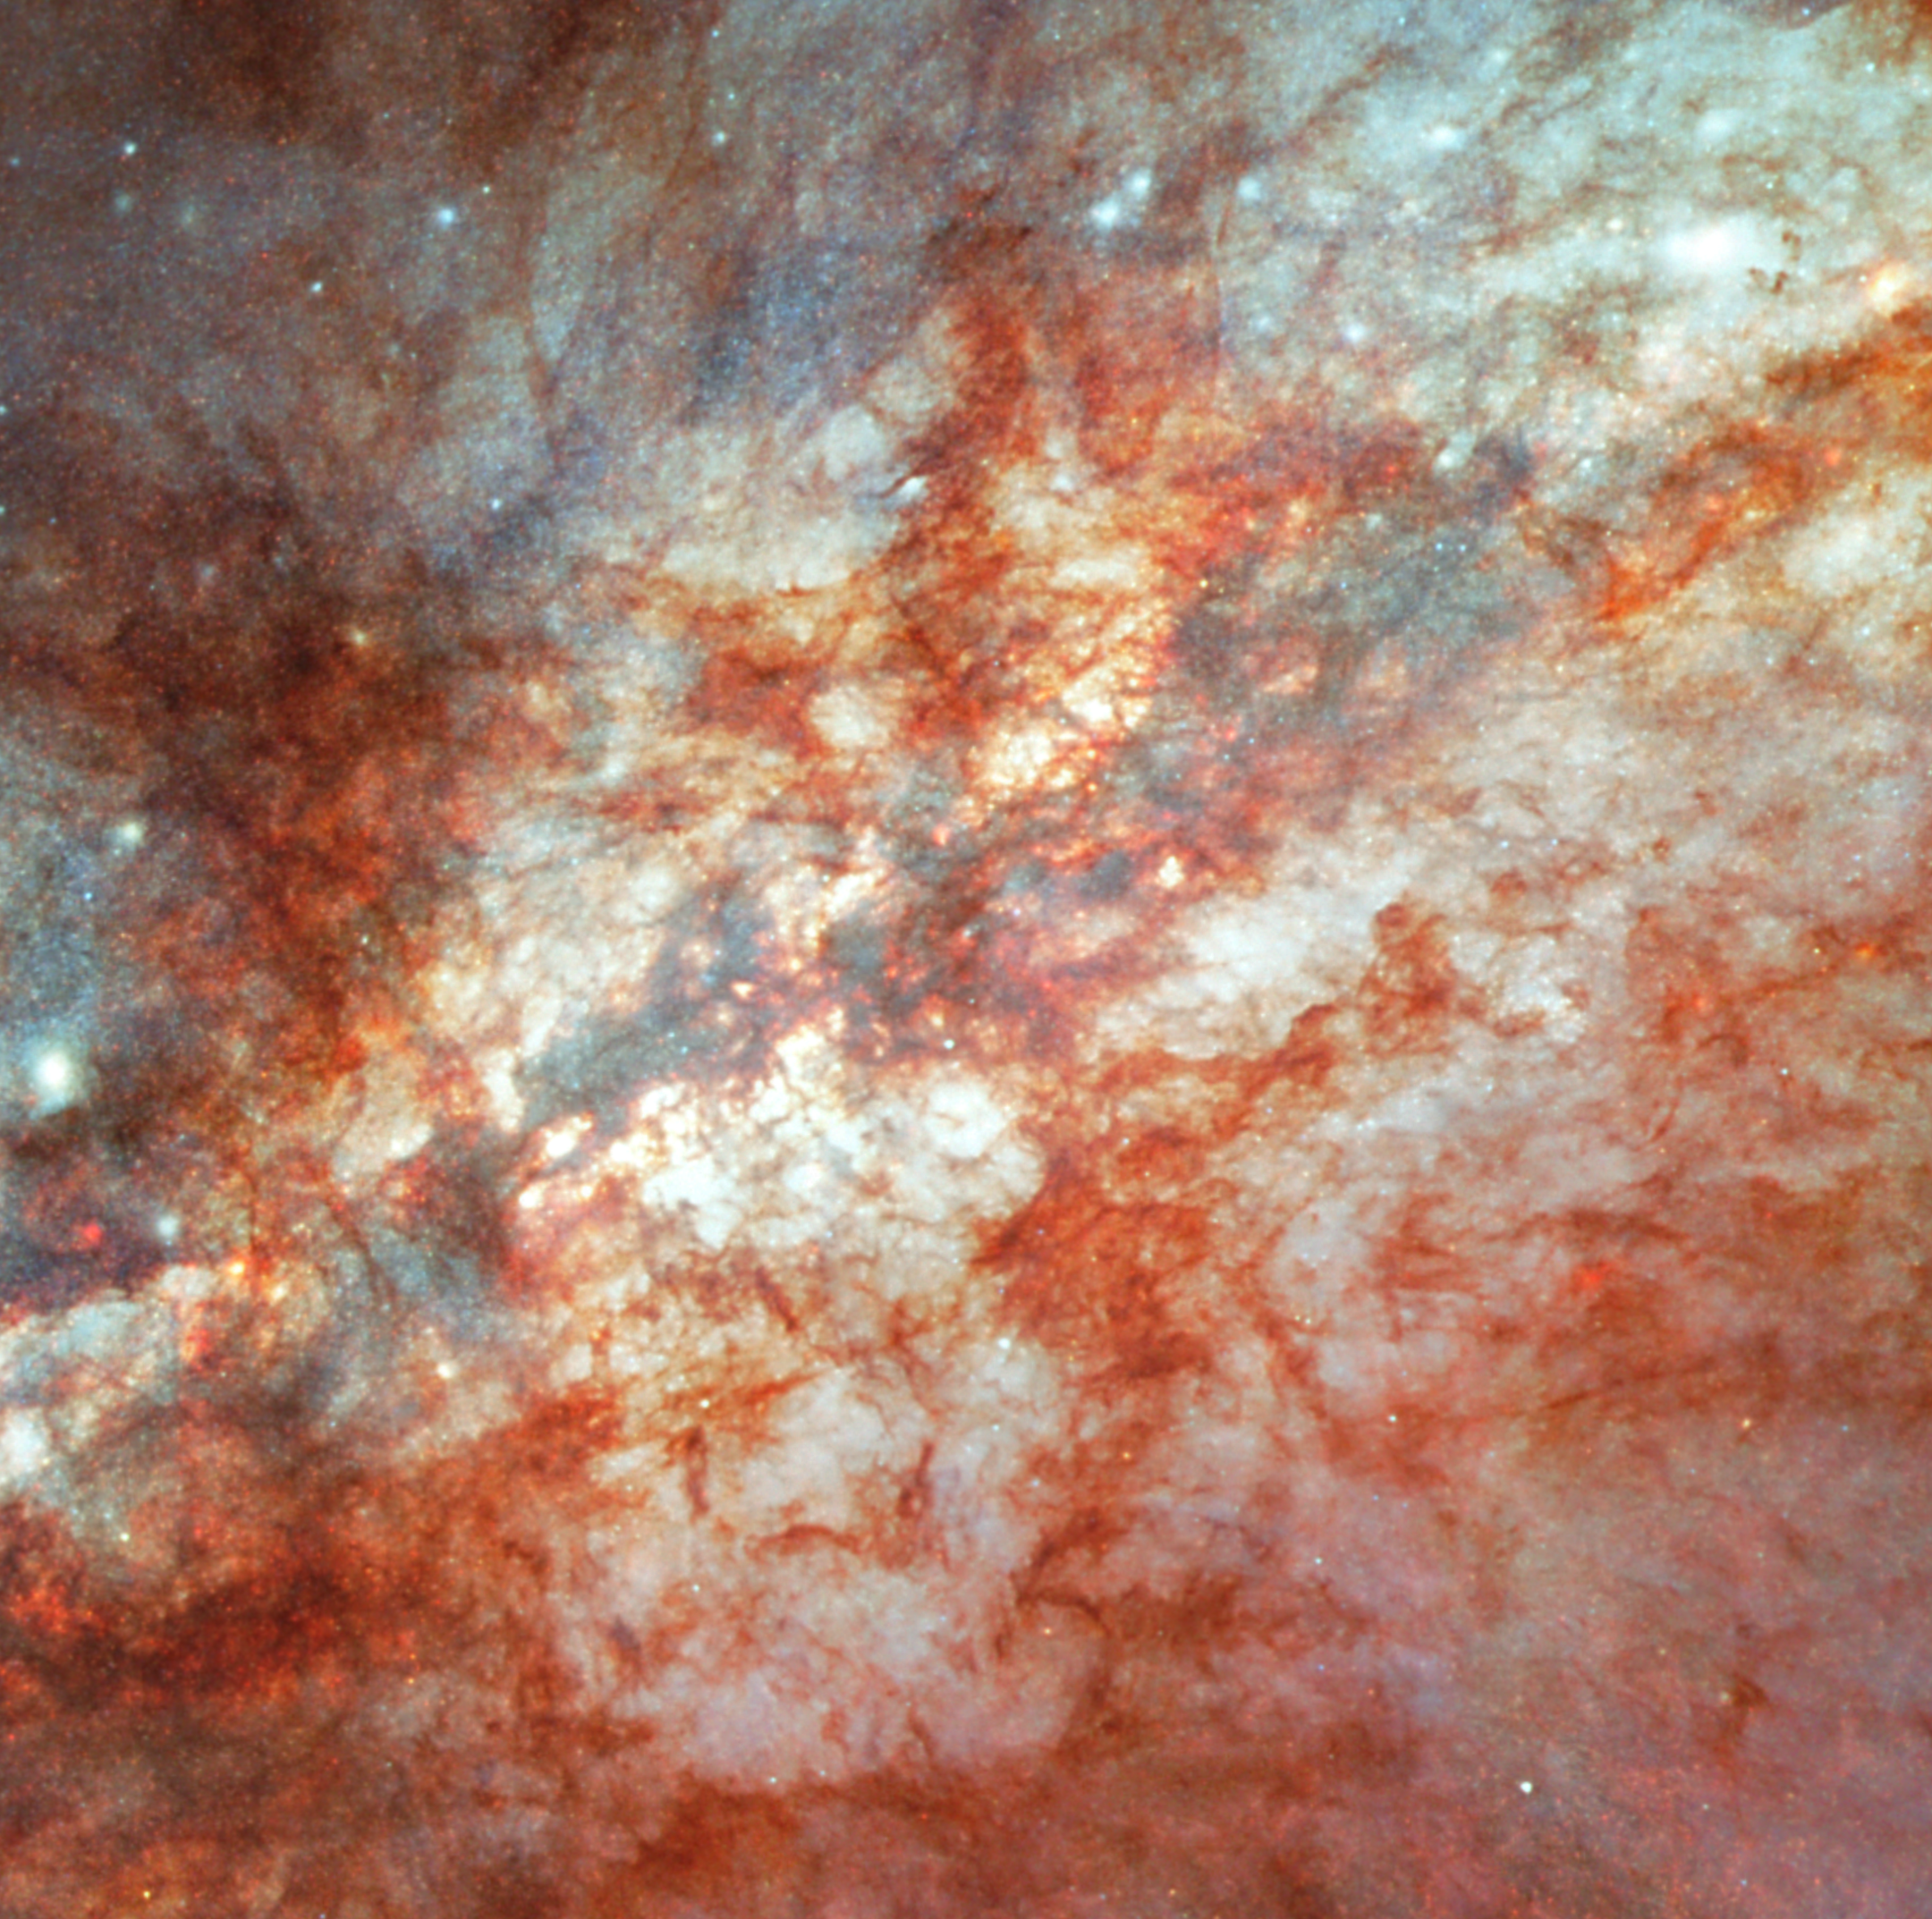

M82 (Hubble image)

This image is from the NASA/ESA Hubble Space Telescope, which was released in 2006 to celebrate the observatory’s 16 years of success.

Throughout the central region of Messier 82, young stars are being born 10 times faster than they are inside in our Milky Way Galaxy. These numerous hot new stars emit not only radiation but also particles called a stellar wind. Stellar winds streaming from these hot new stars also have combined to form a fierce galactic superwind. This superwind compresses enough gas to make millions more stars and blasts out towering plumes of hot ionised hydrogen gas, above and below the disk of the galaxy (seen in red in the image).

You can learn more about this image here.

Credit: NASA, ESA and the Hubble Heritage Team (STScI/AURA). Acknowledgment: J. Gallagher (University of Wisconsin), M. Mountain (STScI) and P. Puxley (NSF)